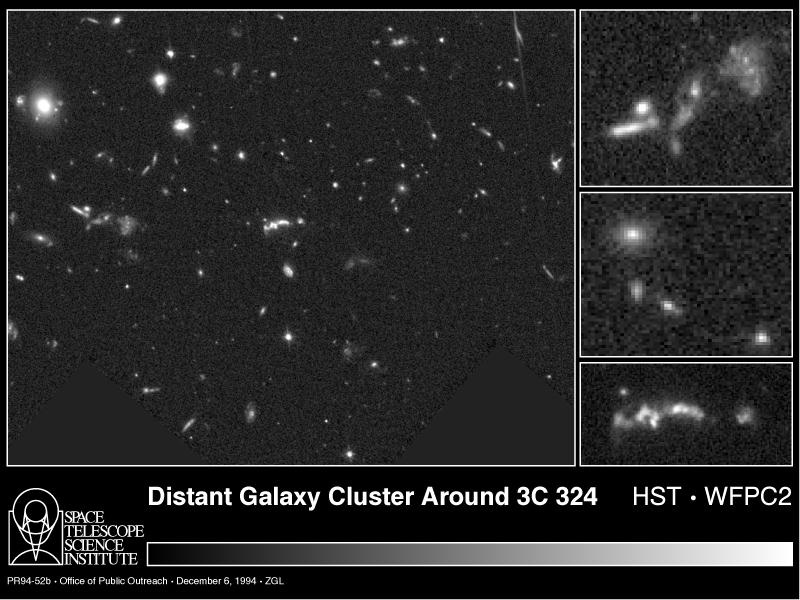

Distant cluster of galaxies

[left]
One of the deepest images to date of the universe, taken with NASA/ESA Hubble Space Telescope href="http://www.spacetelescope.org/about/index.html">HST), reveals thousands of faint galaxies at the detection limit of present day telescopes. Peering across a large volume of the observable cosmos, Hubble resolves thousands of galaxies from five to twelve billion light-years away. The light from these remote objects has taken billions of years to cross the expanding universe, making these distant galaxies fossil evidence" of events that happened when the universe was one-third itspresent age.

A fraction of the galaxies in this image belong to a cluster located nine billion light-years away. Though the field of view (at the cluster's distance) is only two million light-years across, it contains a multitude of fragmentary objects. (By comparison, the two millionlight-years between our Milky Way galaxy and its nearest large companion galaxy, in the constellation Andromeda, is essentially empty space!)

Credit: Mark Dickinson (STScI) and NASA/ESA